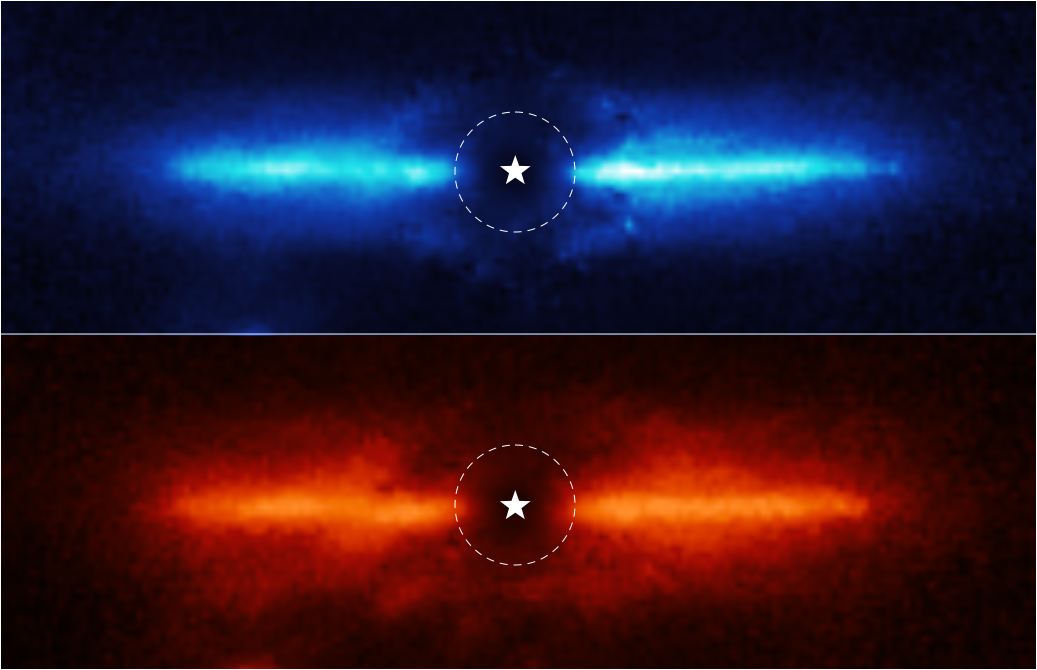

Dusty Debris Disk Around AU Mic

The NASA/ESA/CSA James Webb Space Telescope has imaged the inner workings of a dusty disk surrounding a nearby red dwarf star. These observations represent the first time the previously known disk has been imaged at these infrared wavelengths of light. They also provide clues to the composition of the disk.

These two images are of the dusty debris disk around AU Mic, a red dwarf star located 32 light-years away in the southern constellation Microscopium. Scientists used Webb’s Near-Infrared Camera (NIRCam) to study AU Mic. NIRCam’s coronagraph, which blocked the intense light of the central star, allowed the team to study the region very close to the star. The location of the star, which is masked out, is marked by a white, graphical representation at the center of each image. The region blocked by the coronagraph is shown by a dashed circle.

Webb provided images at 3.56 microns (top, blue) and 4.44 microns (bottom, red). The team found that the disk was brighter at the shorter or “bluer” wavelength, likely meaning that it contains a lot of fine dust that is more efficient at scattering shorter wavelengths of light.

The NIRCam images allowed the researchers to trace the disk, which spans a diameter of 60 astronomical units (9 billion kilometers), as close to the star as 5 astronomical units (740 million kilometers) – the equivalent of Jupiter’s orbit in our solar system. The images were more detailed and brighter than the team expected, and scientists were able to image the disk closer to the star than expected.

While detecting the disk is significant, the team’s ultimate goal is to search for giant planets in wide orbits, similar to Jupiter, Saturn, or the ice giants of our solar system. Such worlds are very difficult to detect around distant stars using either the transit or radial velocity methods.

These results are being presented in a press conference at the 241st meeting of the American Astronomical Society. The observations were obtained as part of Webb’s Guaranteed Time program 1184.

Credit: NASA, ESA, CSA, and K. Lawson (Goddard Space Flight Center), A. Pagan (STScI)